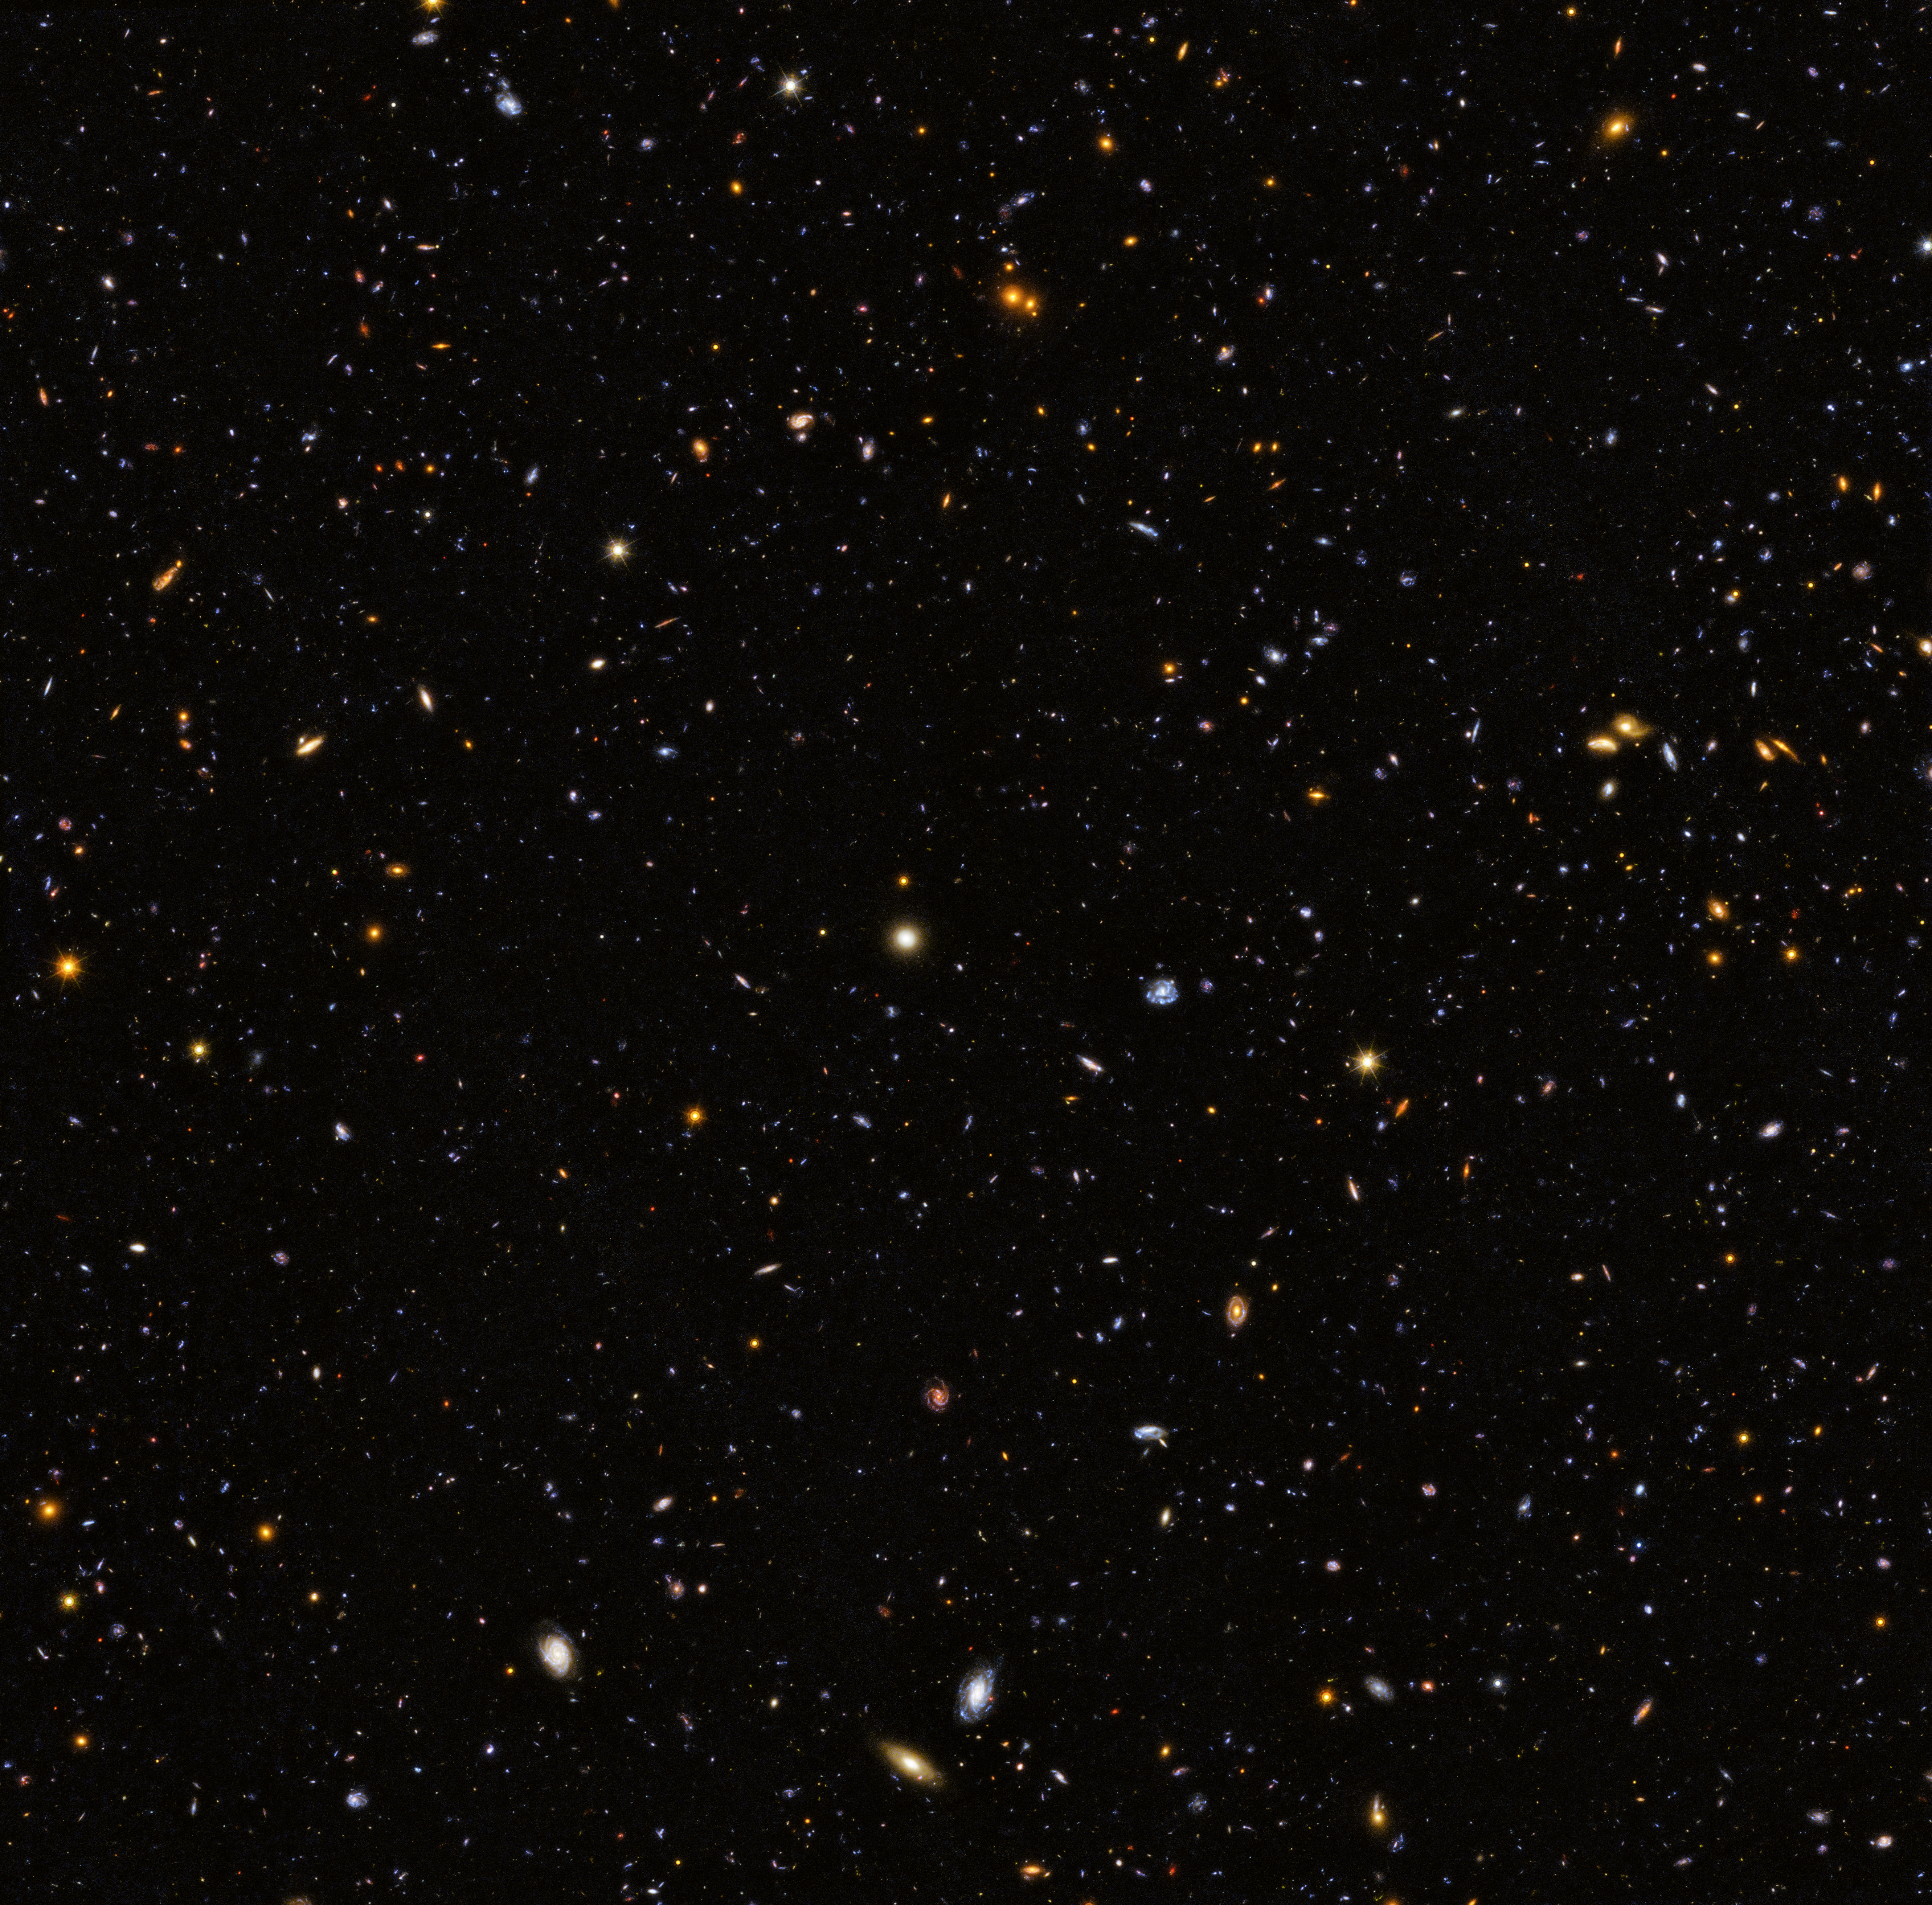

GOODS-South Hubble Deep UV Legacy Field

Following on from last week’s Picture of the Week, this week we showcase the second part of the Hubble Deep UV (HDUV) Legacy Field, the GOODS-South view. With the addition of new ultraviolet light imagery, astronomers using the NASA/ESA Hubble Space Telescope have captured the largest panoramic view of the fire and fury of star birth in the distant Universe, encompassing 12 000 star-forming galaxies.

Hubble’s ultraviolet vision opens up a new window on the evolving Universe, tracking the birth of stars over the last 11 billion years up to the cosmos’s busiest star-forming period, which happened about three billion years after the Big Bang.

So far, ultraviolet light has been the missing piece of the cosmic puzzle. Now, combined with data in infrared, and visible light from Hubble and other space- and ground-based telescopes, astronomers have assembled the most comprehensive portrait yet of the Universe’s evolutionary history. The image straddles the gap between the very distant galaxies, which can only be viewed in infrared light, and closer galaxies, which can be seen across different wavelengths. The light from distant star-forming regions in remote galaxies started out as ultraviolet, but the expansion of the Universe has shifted the light into infrared wavelengths. By comparing images of star formation in the distant and nearby Universe, astronomers can get a better understanding of how nearby galaxies grew from small clumps of hot, young stars long ago.

The observation programme harnessed the ultraviolet vision of Hubble’s Wide Field Camera 3. This study extends and builds on the previous Hubble multi-wavelength data in the CANDELS-Deep (Cosmic Assembly Near-infrared Deep Extragalactic Legacy Survey) fields within the central part of the GOODS (The Great Observatories Origins Deep Survey) fields. This mosaic is 14 times the area of the Hubble Ultraviolet Ultra Deep Field released in 2014.

Credit: ESA/Hubble & NASA